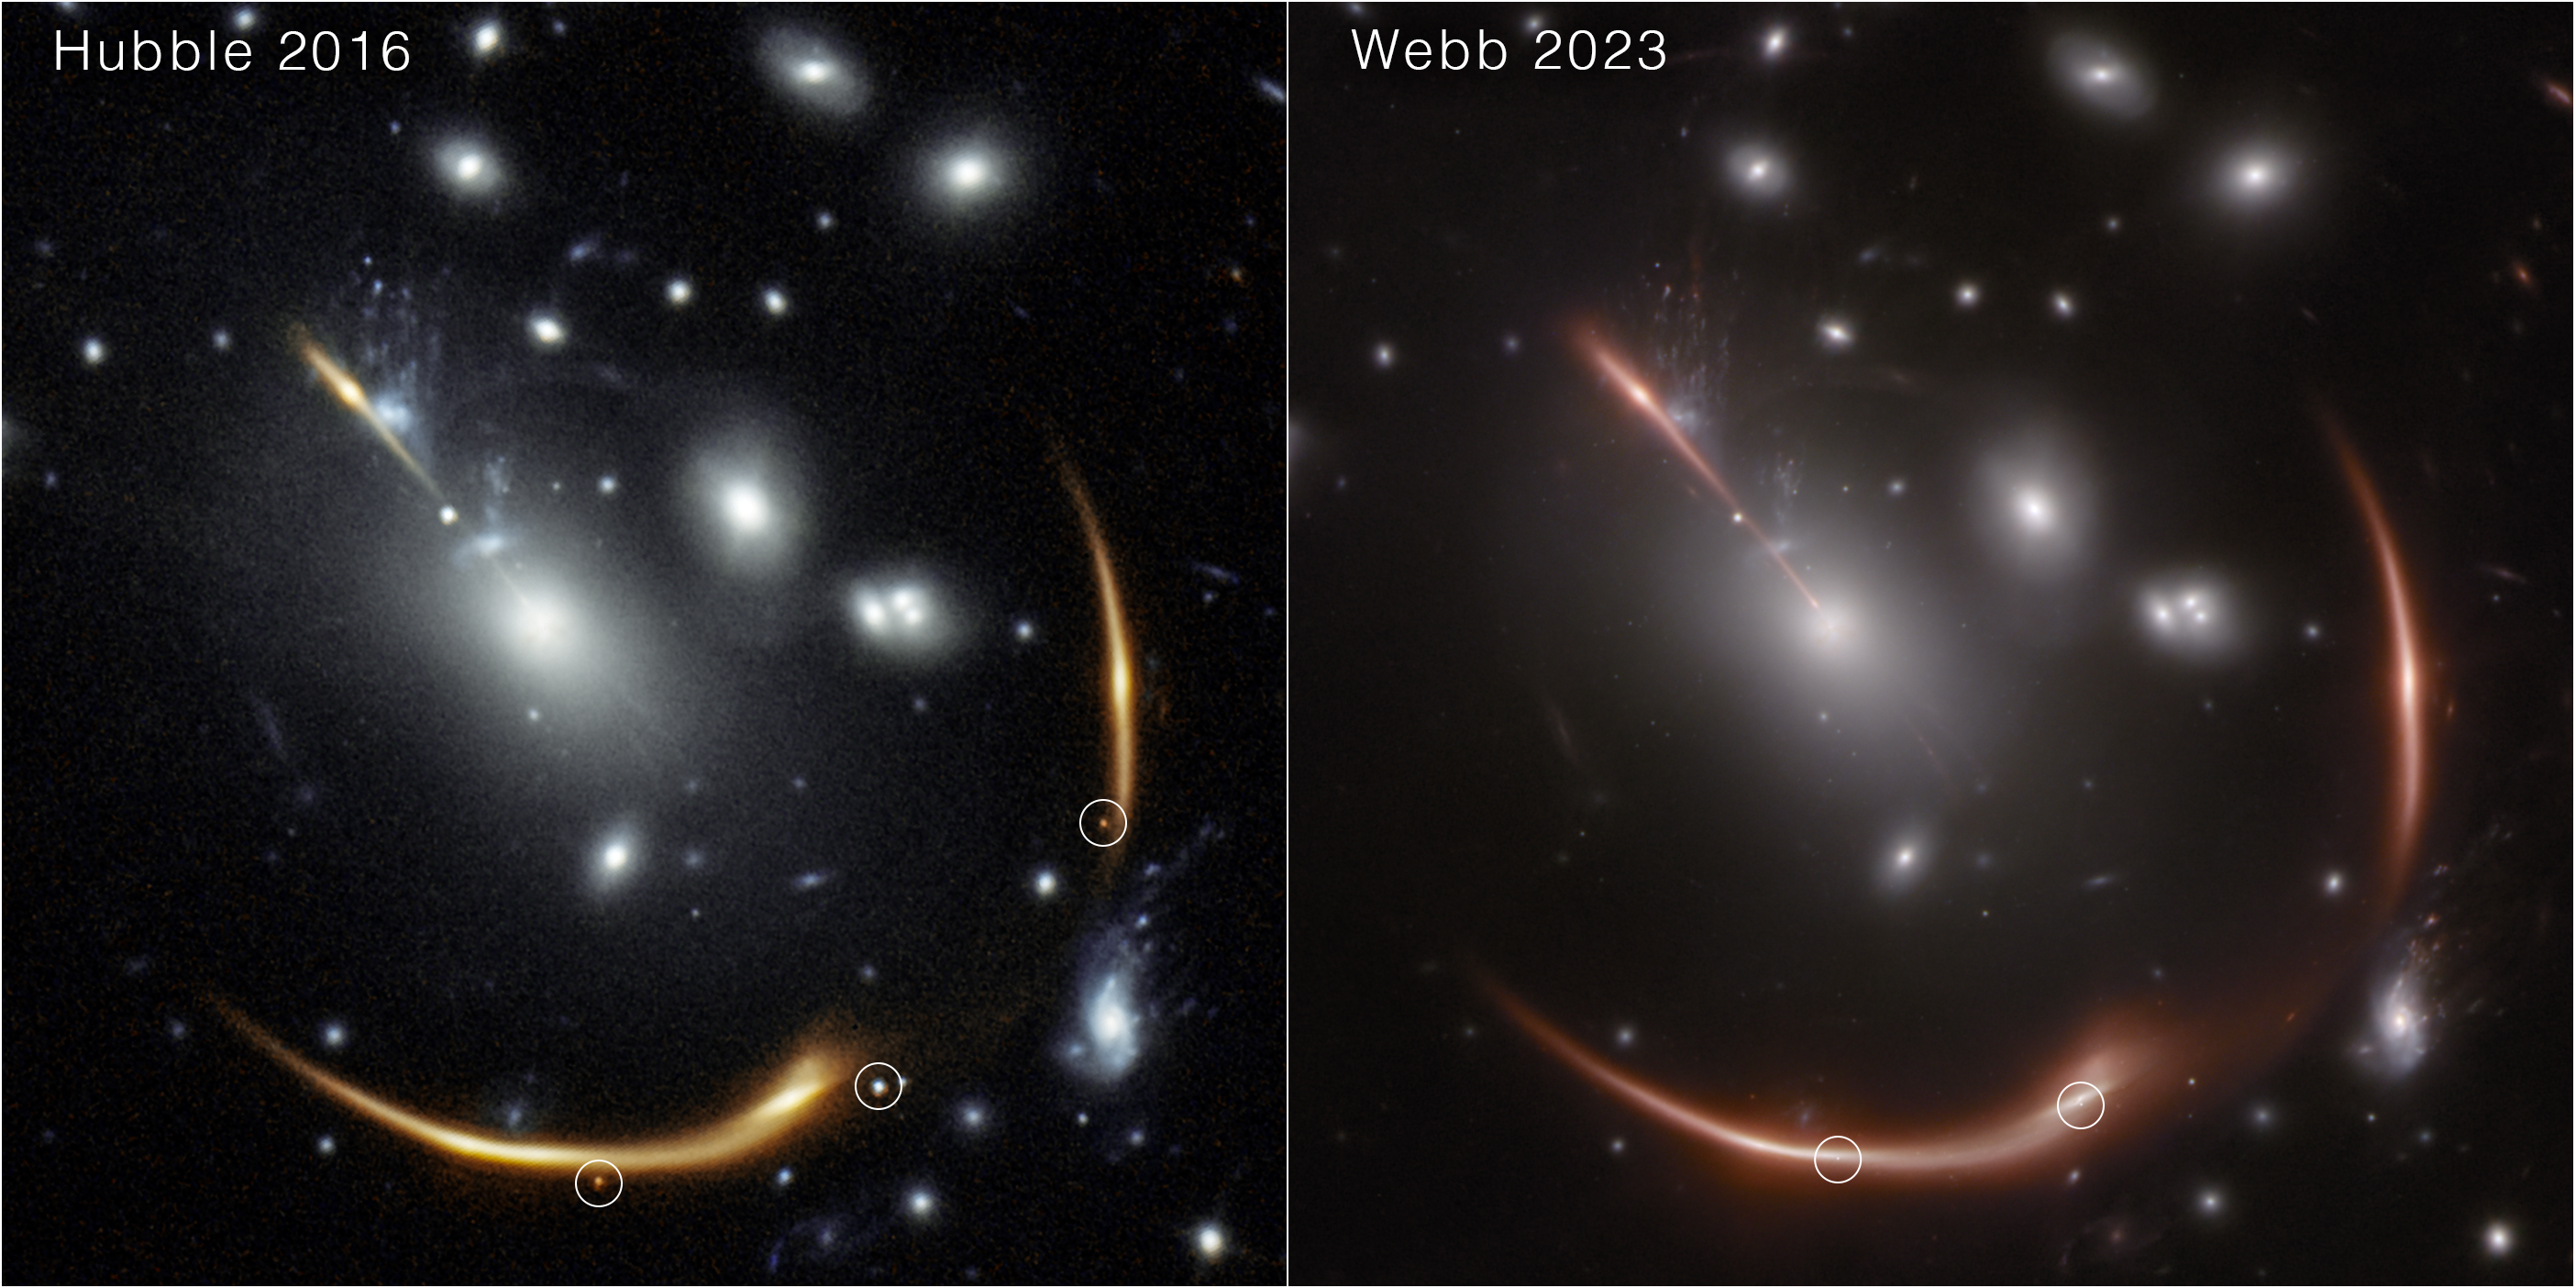

Webb spots a second lensed supernova in a distant galaxy

Left: In 2016 the NASA/ESA Hubble Space Telescope spotted a multiply imaged supernova, nicknamed Supernova Requiem, in a distant galaxy lensed by the intervening galaxy cluster MACS J0138. Three images of the supernova are visible, and a fourth image is expected to arrive in 2035. In this near-infrared image, light at 1.05 microns is represented in blue and 1.60 microns is orange.

Right: In November 2023 the NASA/ESA/CSA James Webb Space Telescope identified a second multiply imaged supernova in the same galaxy using its NIRCam (Near-Infrared Camera) instrument. This is the first known system to produce more than one multiply-imaged supernova.

Credit: Hubble image: NASA, ESA, STScI, Steve A. Rodney (University of South Carolina) and Gabriel Brammer (Cosmic Dawn Center/Niels Bohr Institute/University of Copenhagen);Webb image: NASA, ESA, CSA, STScI, Justin Pierel (STScI) and Andrew Newman (Carnegie Institution for Science).